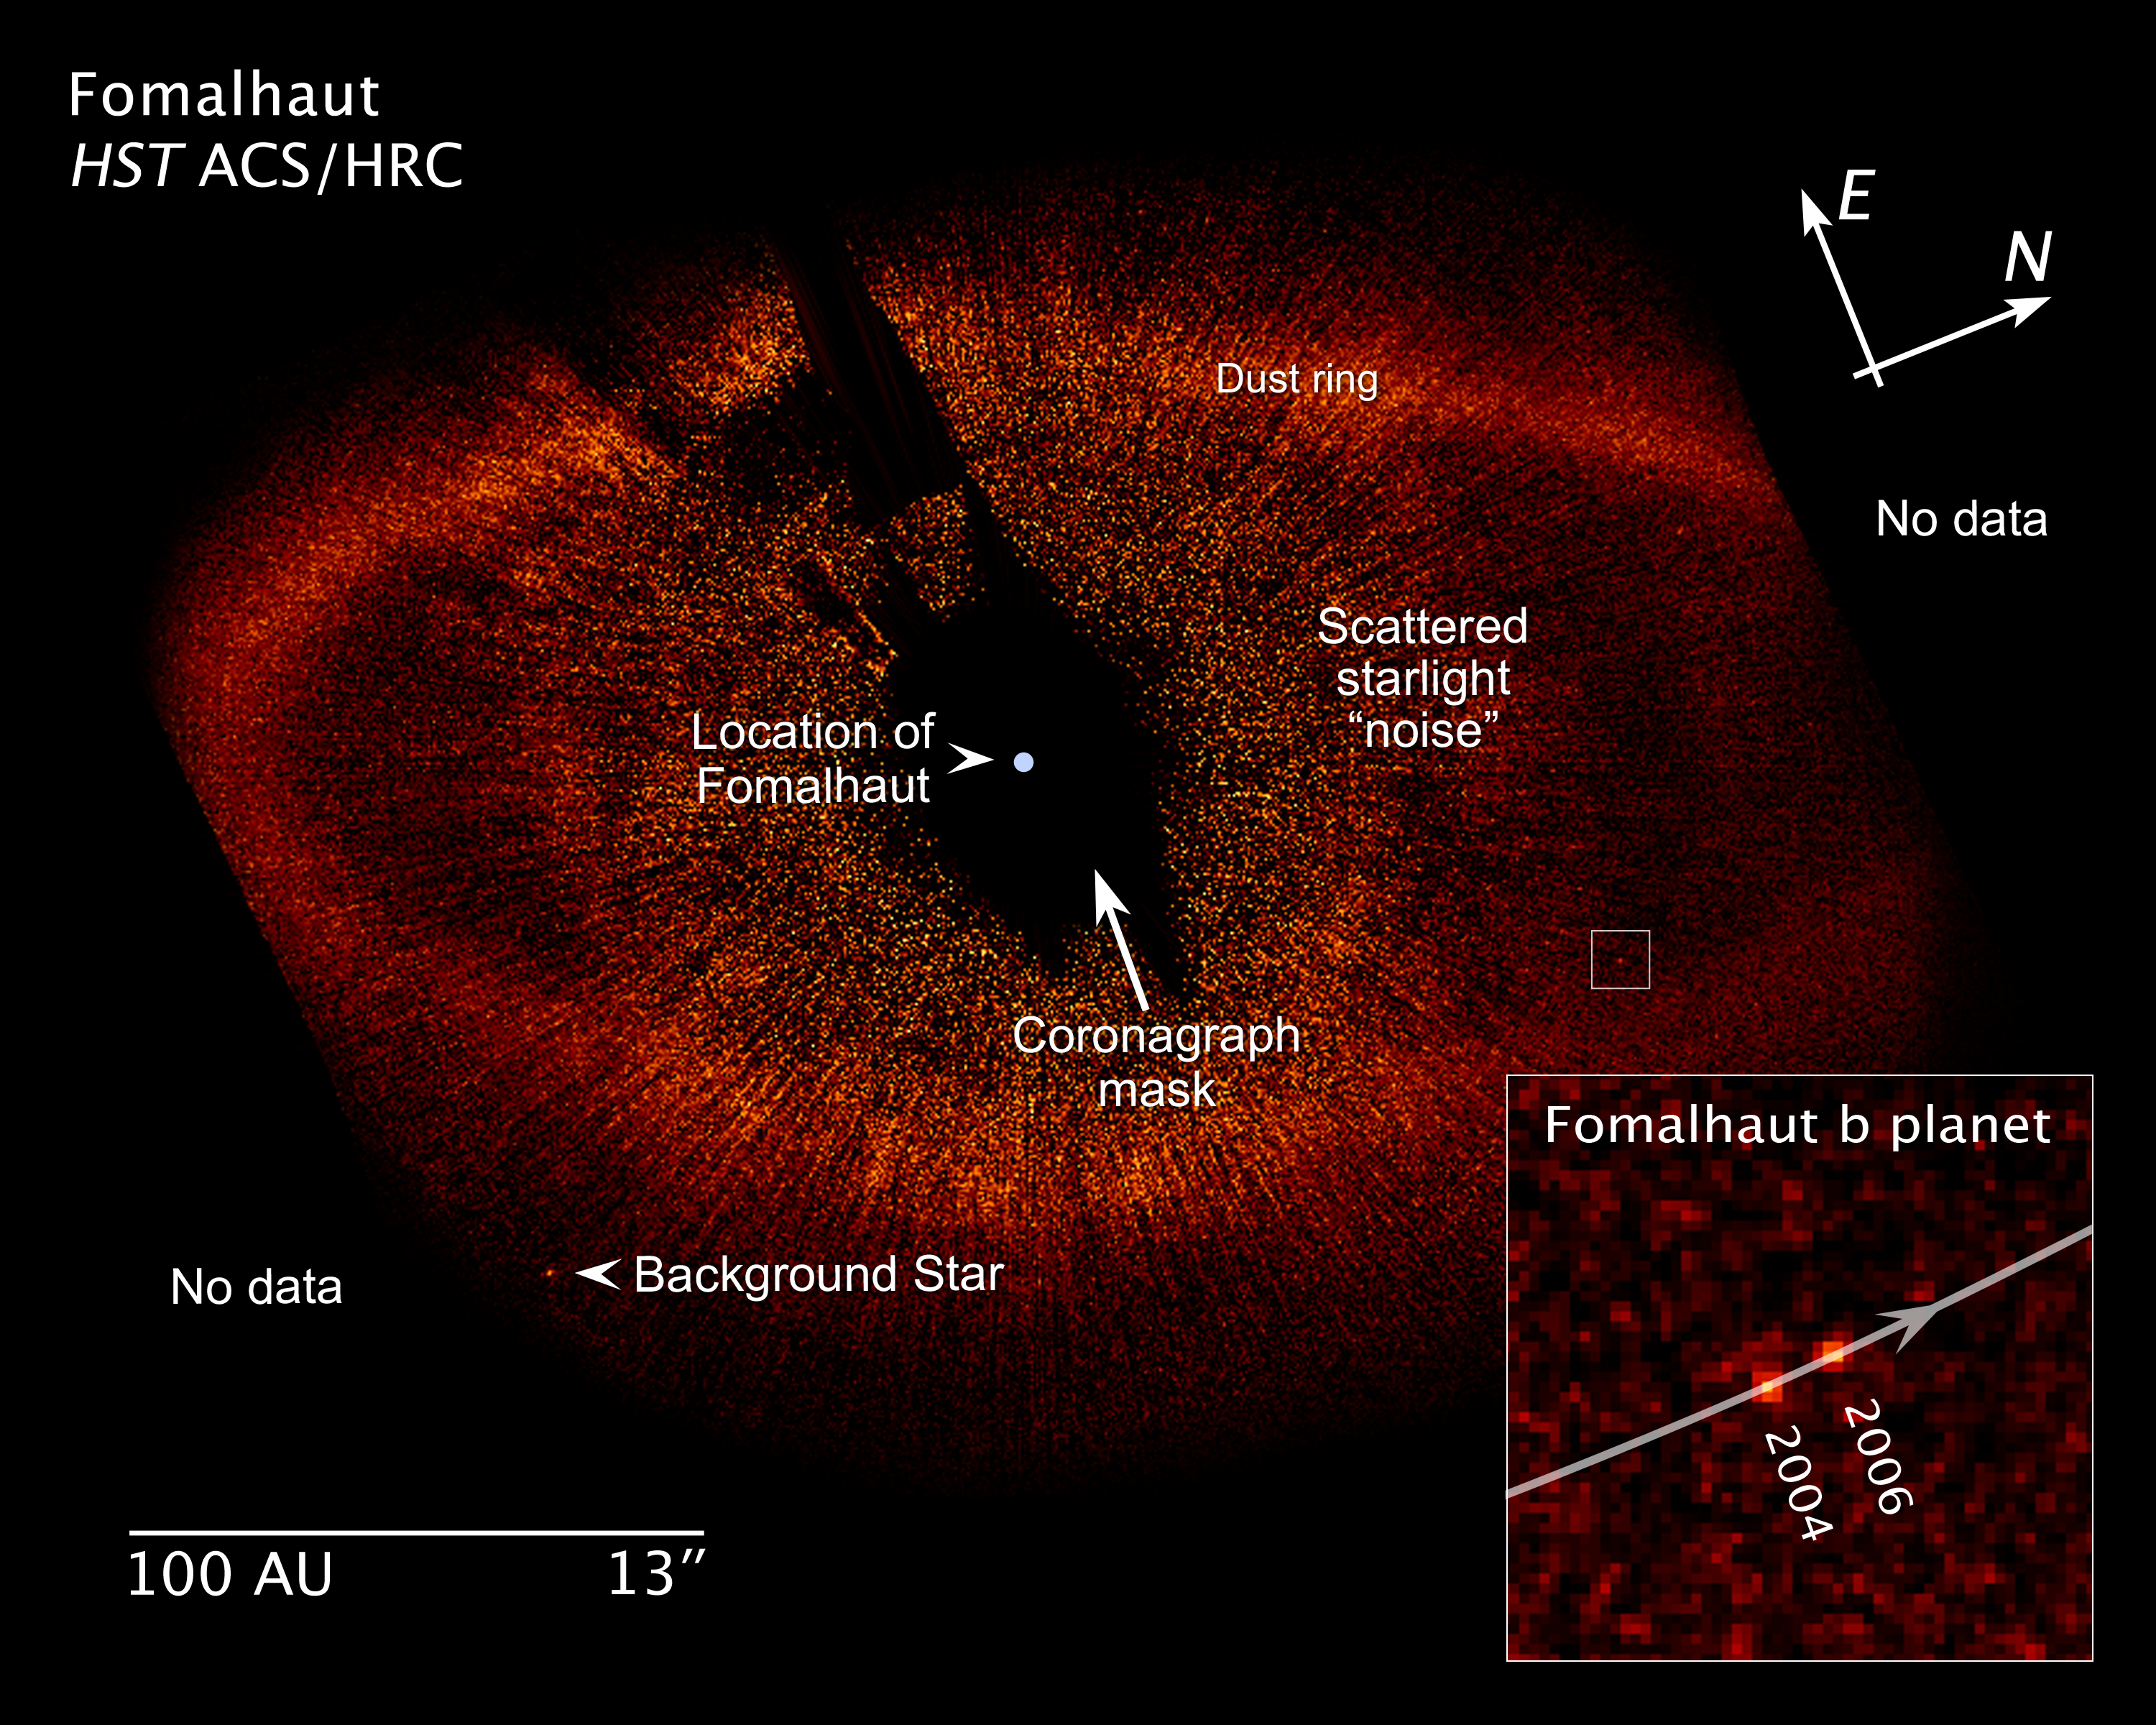

Annotated illustration of Fomalhaut system

This annotated image shows key features of the Fomalhaut system, including the newly discovered planet Fomalhaut b, and the dust ring. Also included are a distance scale and an insert, showing how the planet has moved around its parent star over the course of 21 months. The Fomalhaut system is located approximately 25 light-years from the Earth.

Credit: NASA, ESA, and Z. Levay (STScI)